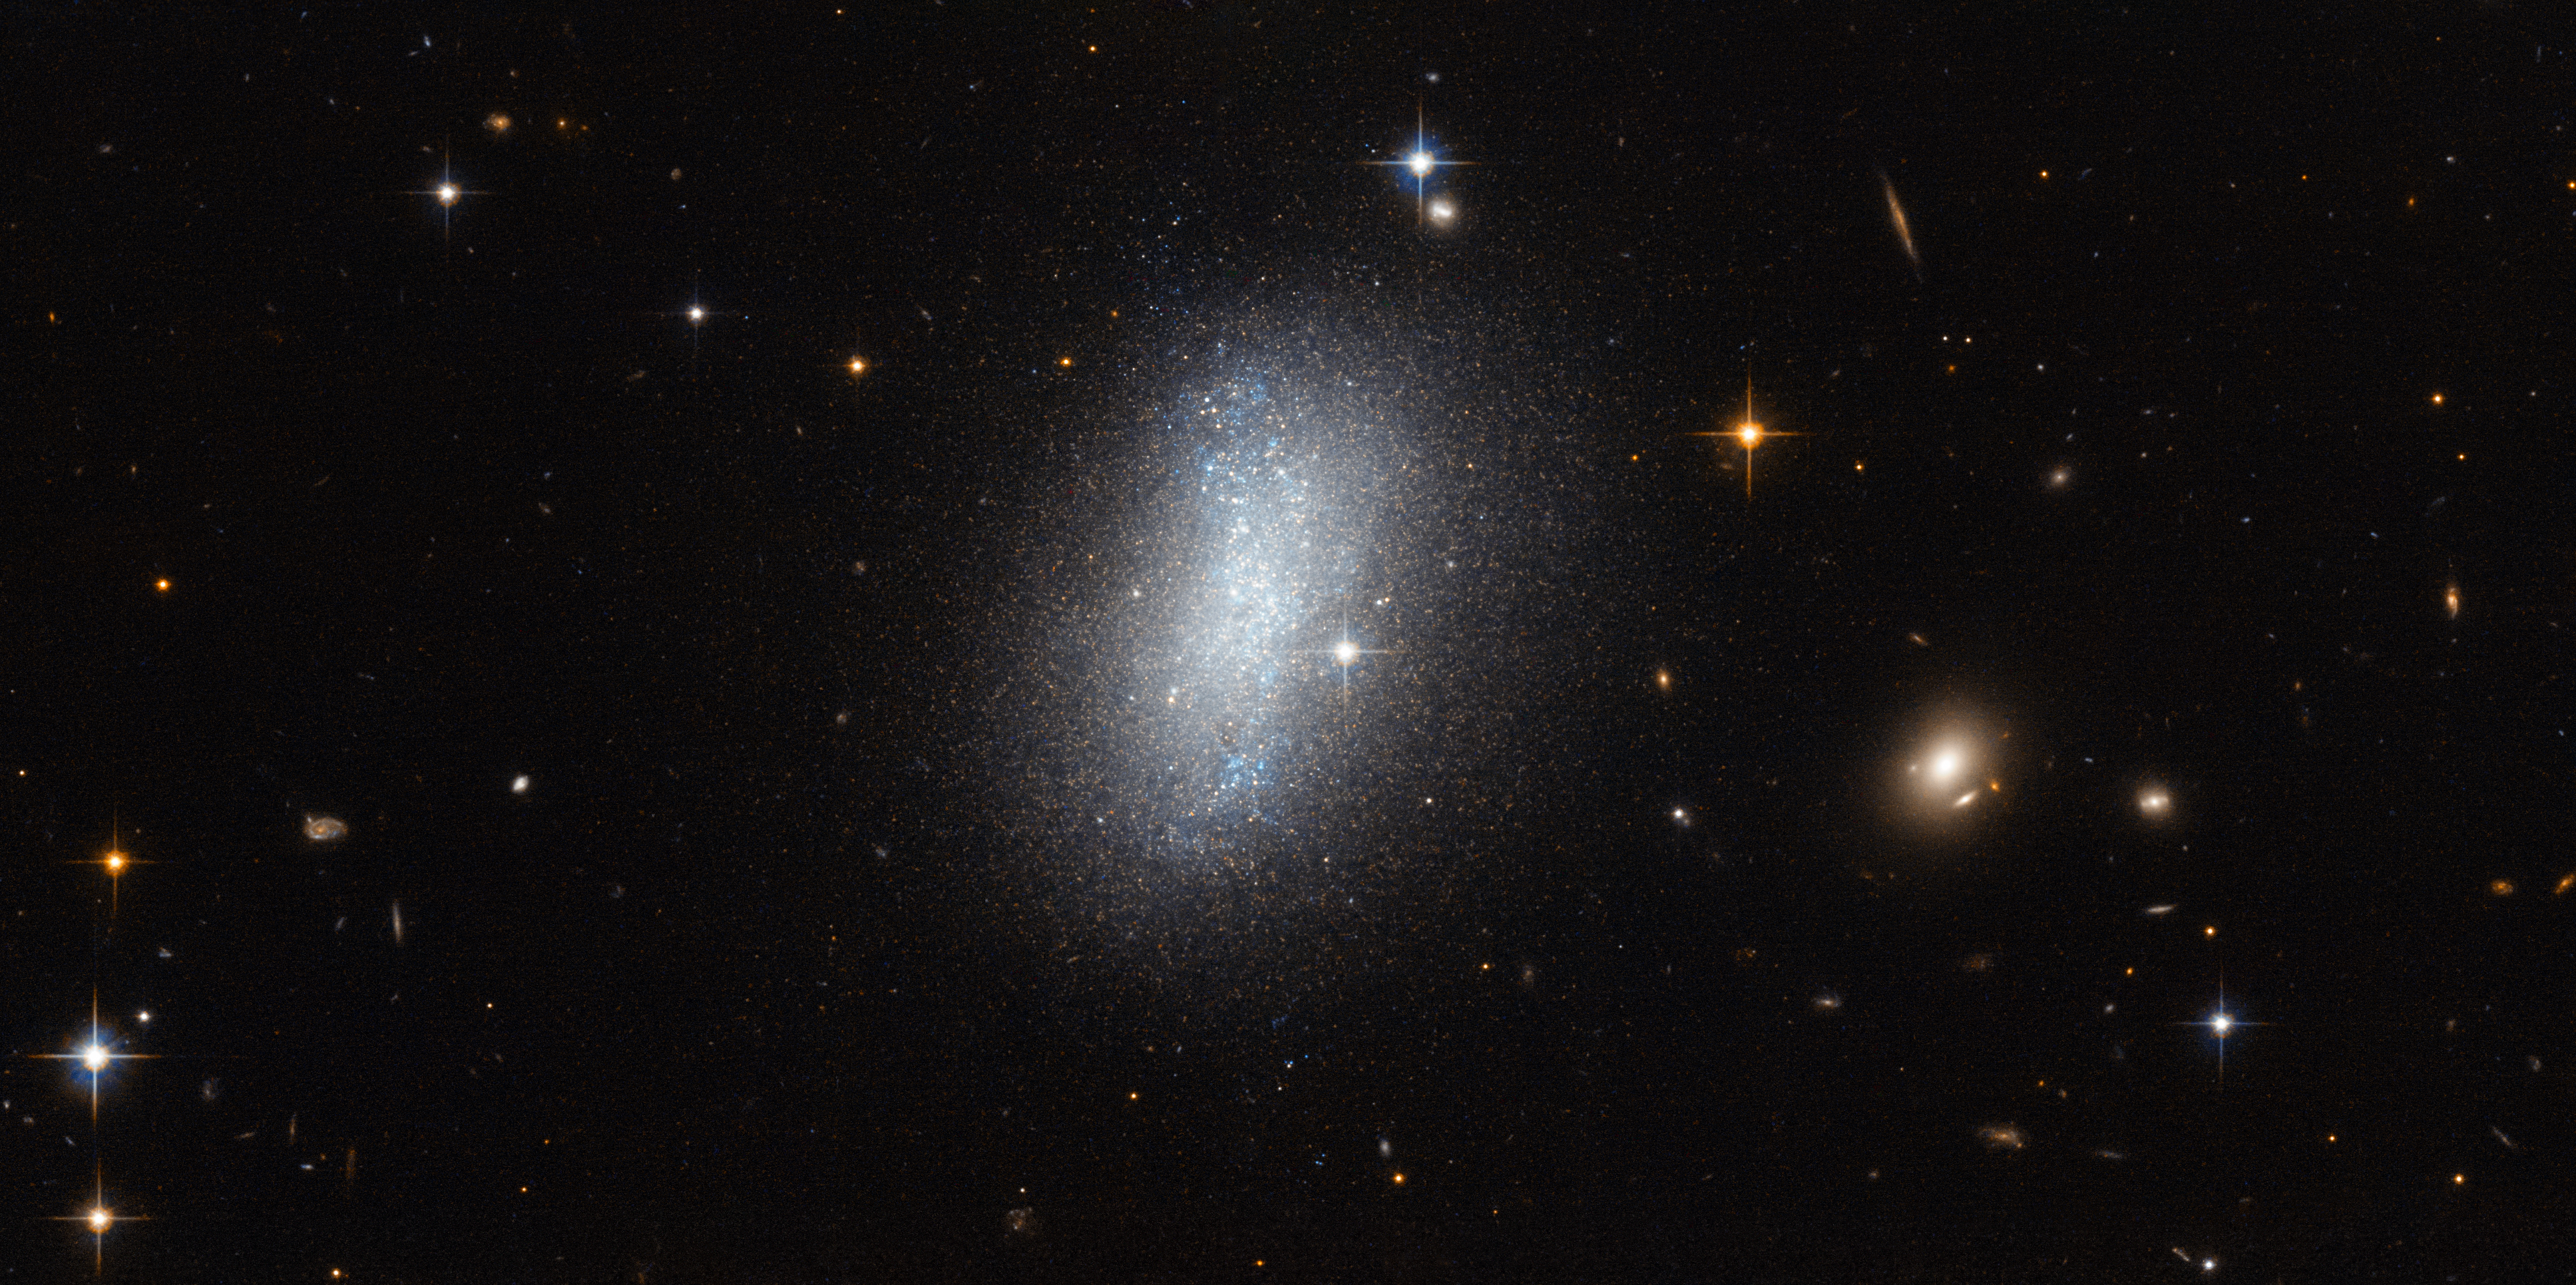

Meeting the neighbours

There are many galaxies in the Universe and although there is plenty of room, they tend to stick together. The Milky Way, for example, is part of a large gathering of over fifty galaxies known as the Local Group. Galaxy groups like this come together to form even larger groups called clusters which can congregate further still to create mammoth superclusters.

The sphere of space surrounding our galaxy is known as the Local Volume, a region some 35 million light-years in diameter and home to several hundred known galaxies. The subject of this new NASA/ESA Hubble Space Telescope image, a beautiful dwarf irregular galaxy known as PGC 18431, is one of these galaxies.

This image shows PGC 18431 smudged across the sky, but it wasn’t imaged purely for its looks. These Hubble observations were gathered in order to probe how Local Volume galaxies cluster together and move around. Hubble’s high resolution allows astronomers to explore star populations within these moderately distant galaxies — specifically, stars known as tip of the red-giant branch stars — in order to get an idea of the galaxy’s composition and, crucially, its distance from us. Knowing galactic distances enables us to accurately map a galaxy sample in three dimensions, a method key to understanding more about our cosmic neighbours, and to dismiss perspective and line-of-sight illusions.

Credit: ESA/Hubble & NASA